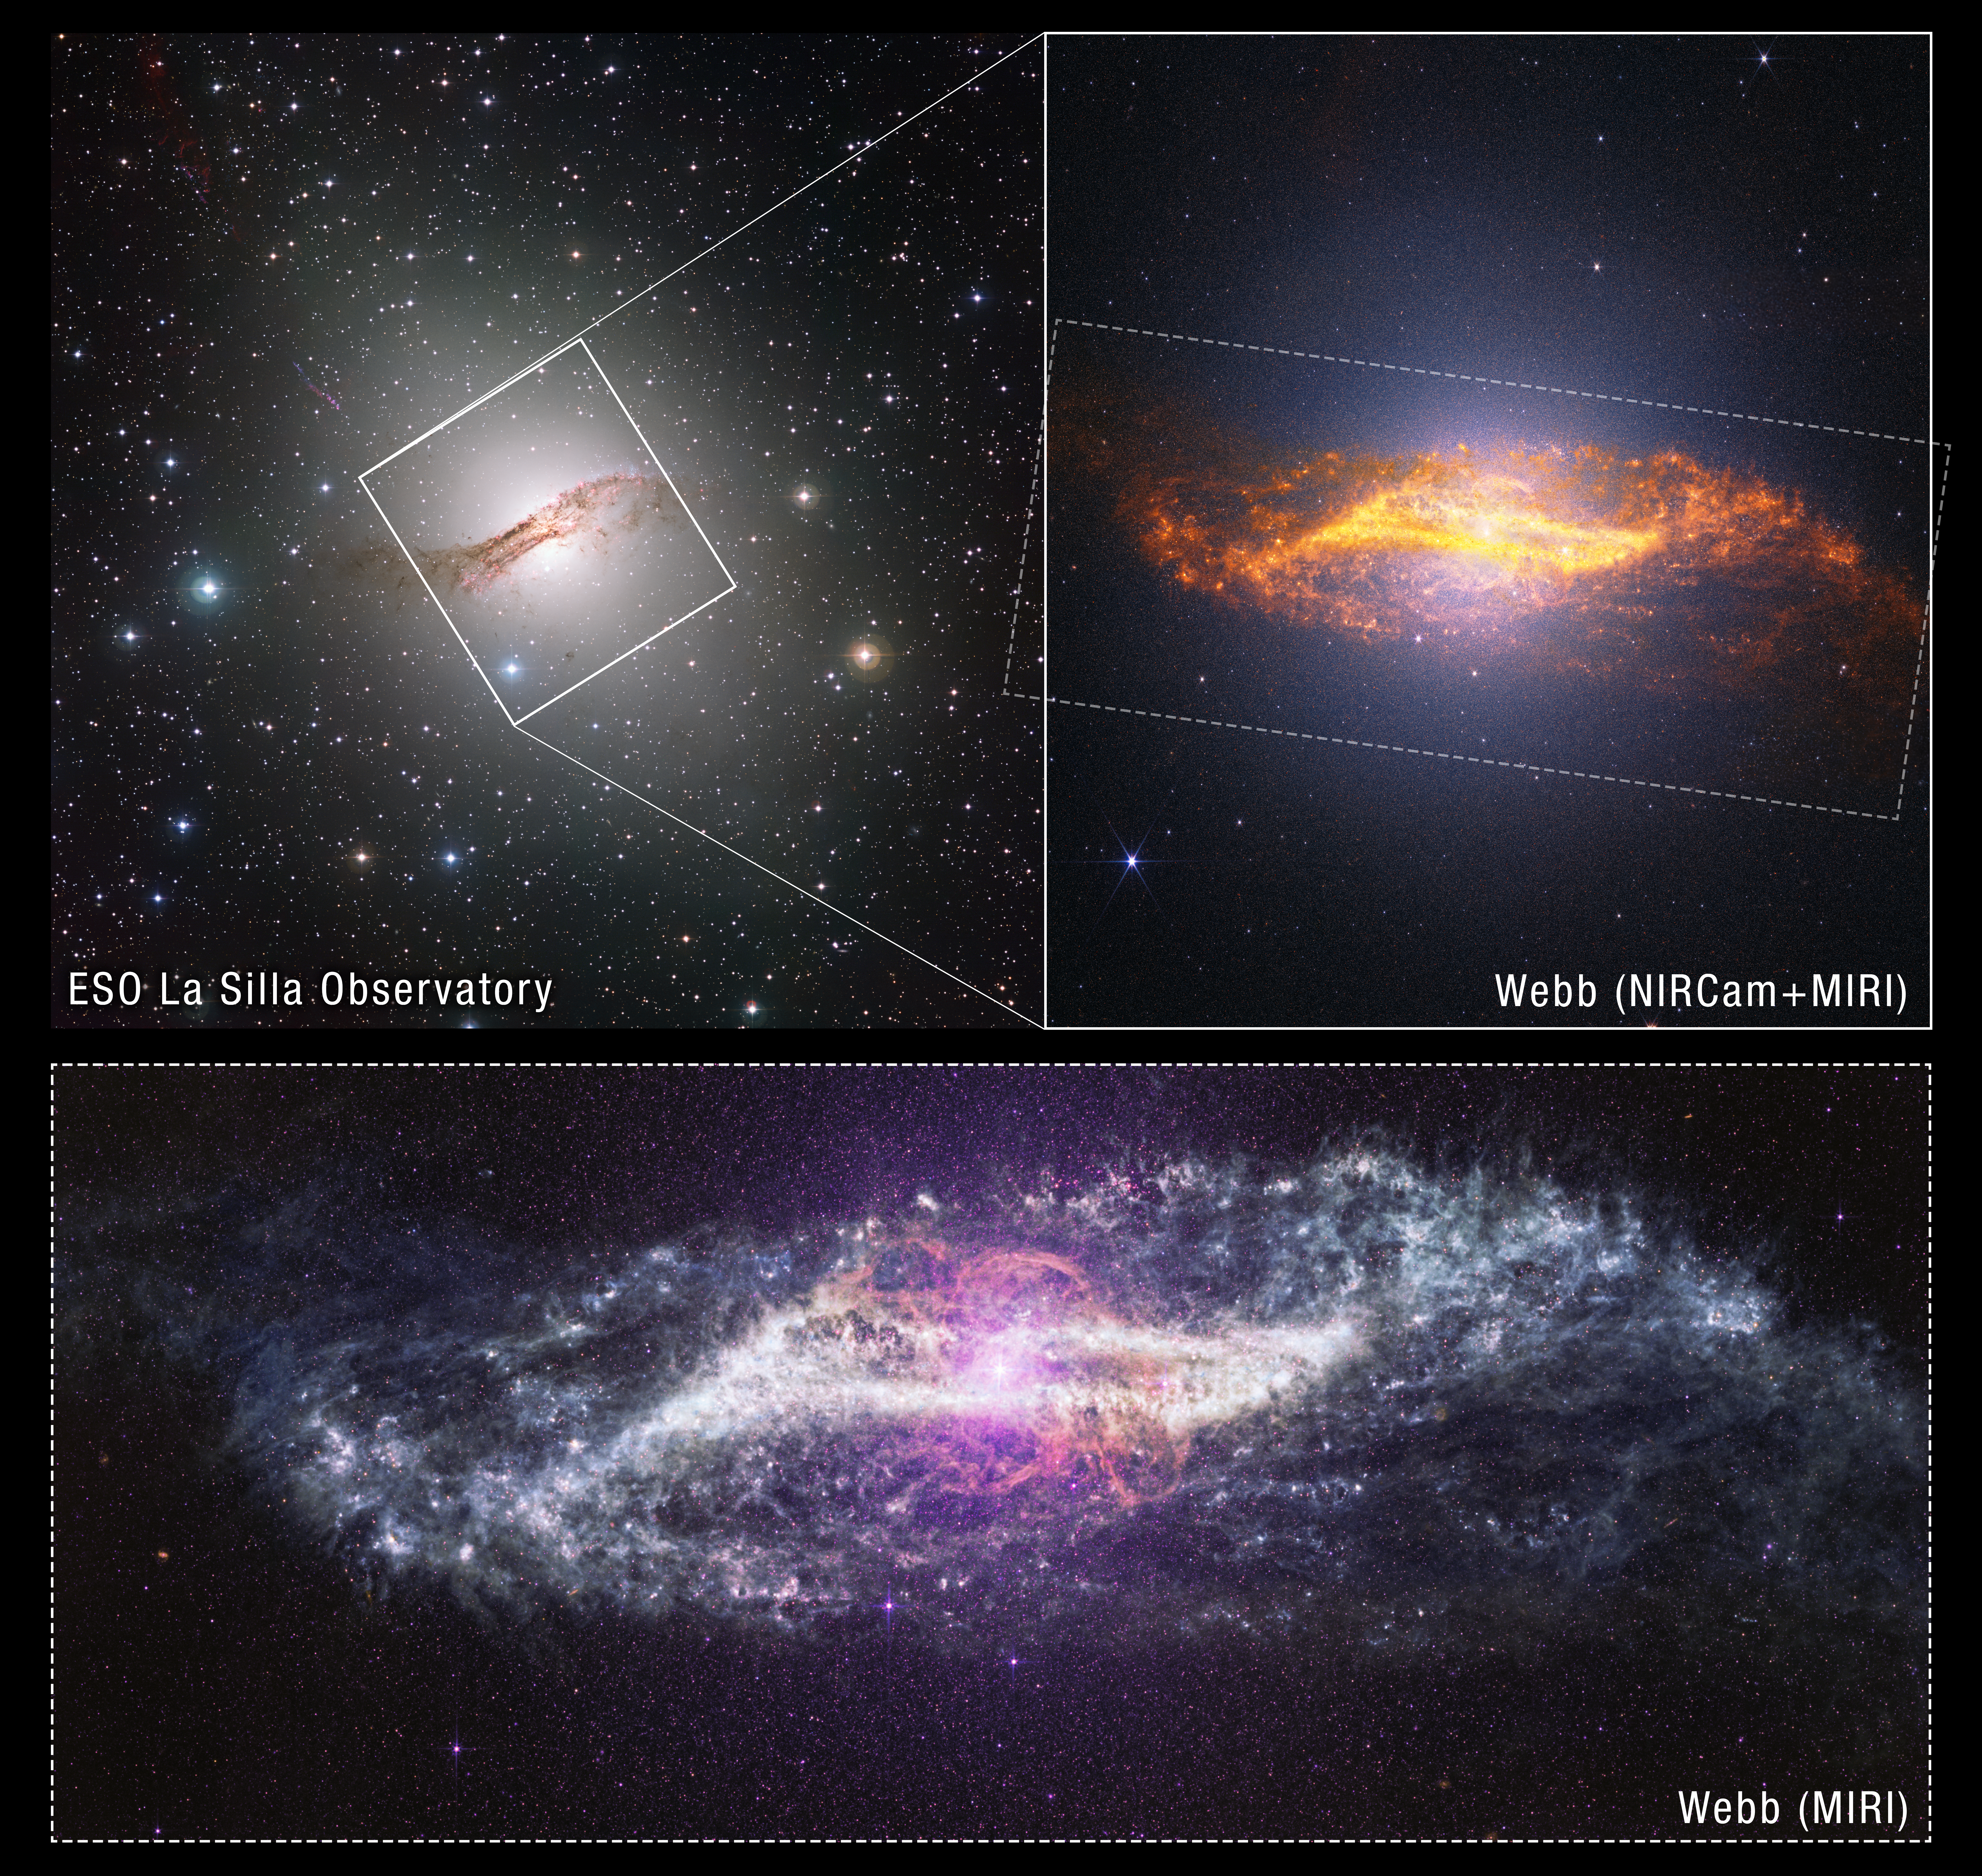

Centaurus A: ground-based context

This ground-based image of nearby galaxy Centaurus A from the European Southern Observatory (top left) puts the near-infrared and mid-infrared views from the NASA/ESA/CSA James Webb Space Telescope image into context.

Credit: ESO, NASA, ESA, CSA, STScI, ESO; Image Processing: A. Pagan (STScI)